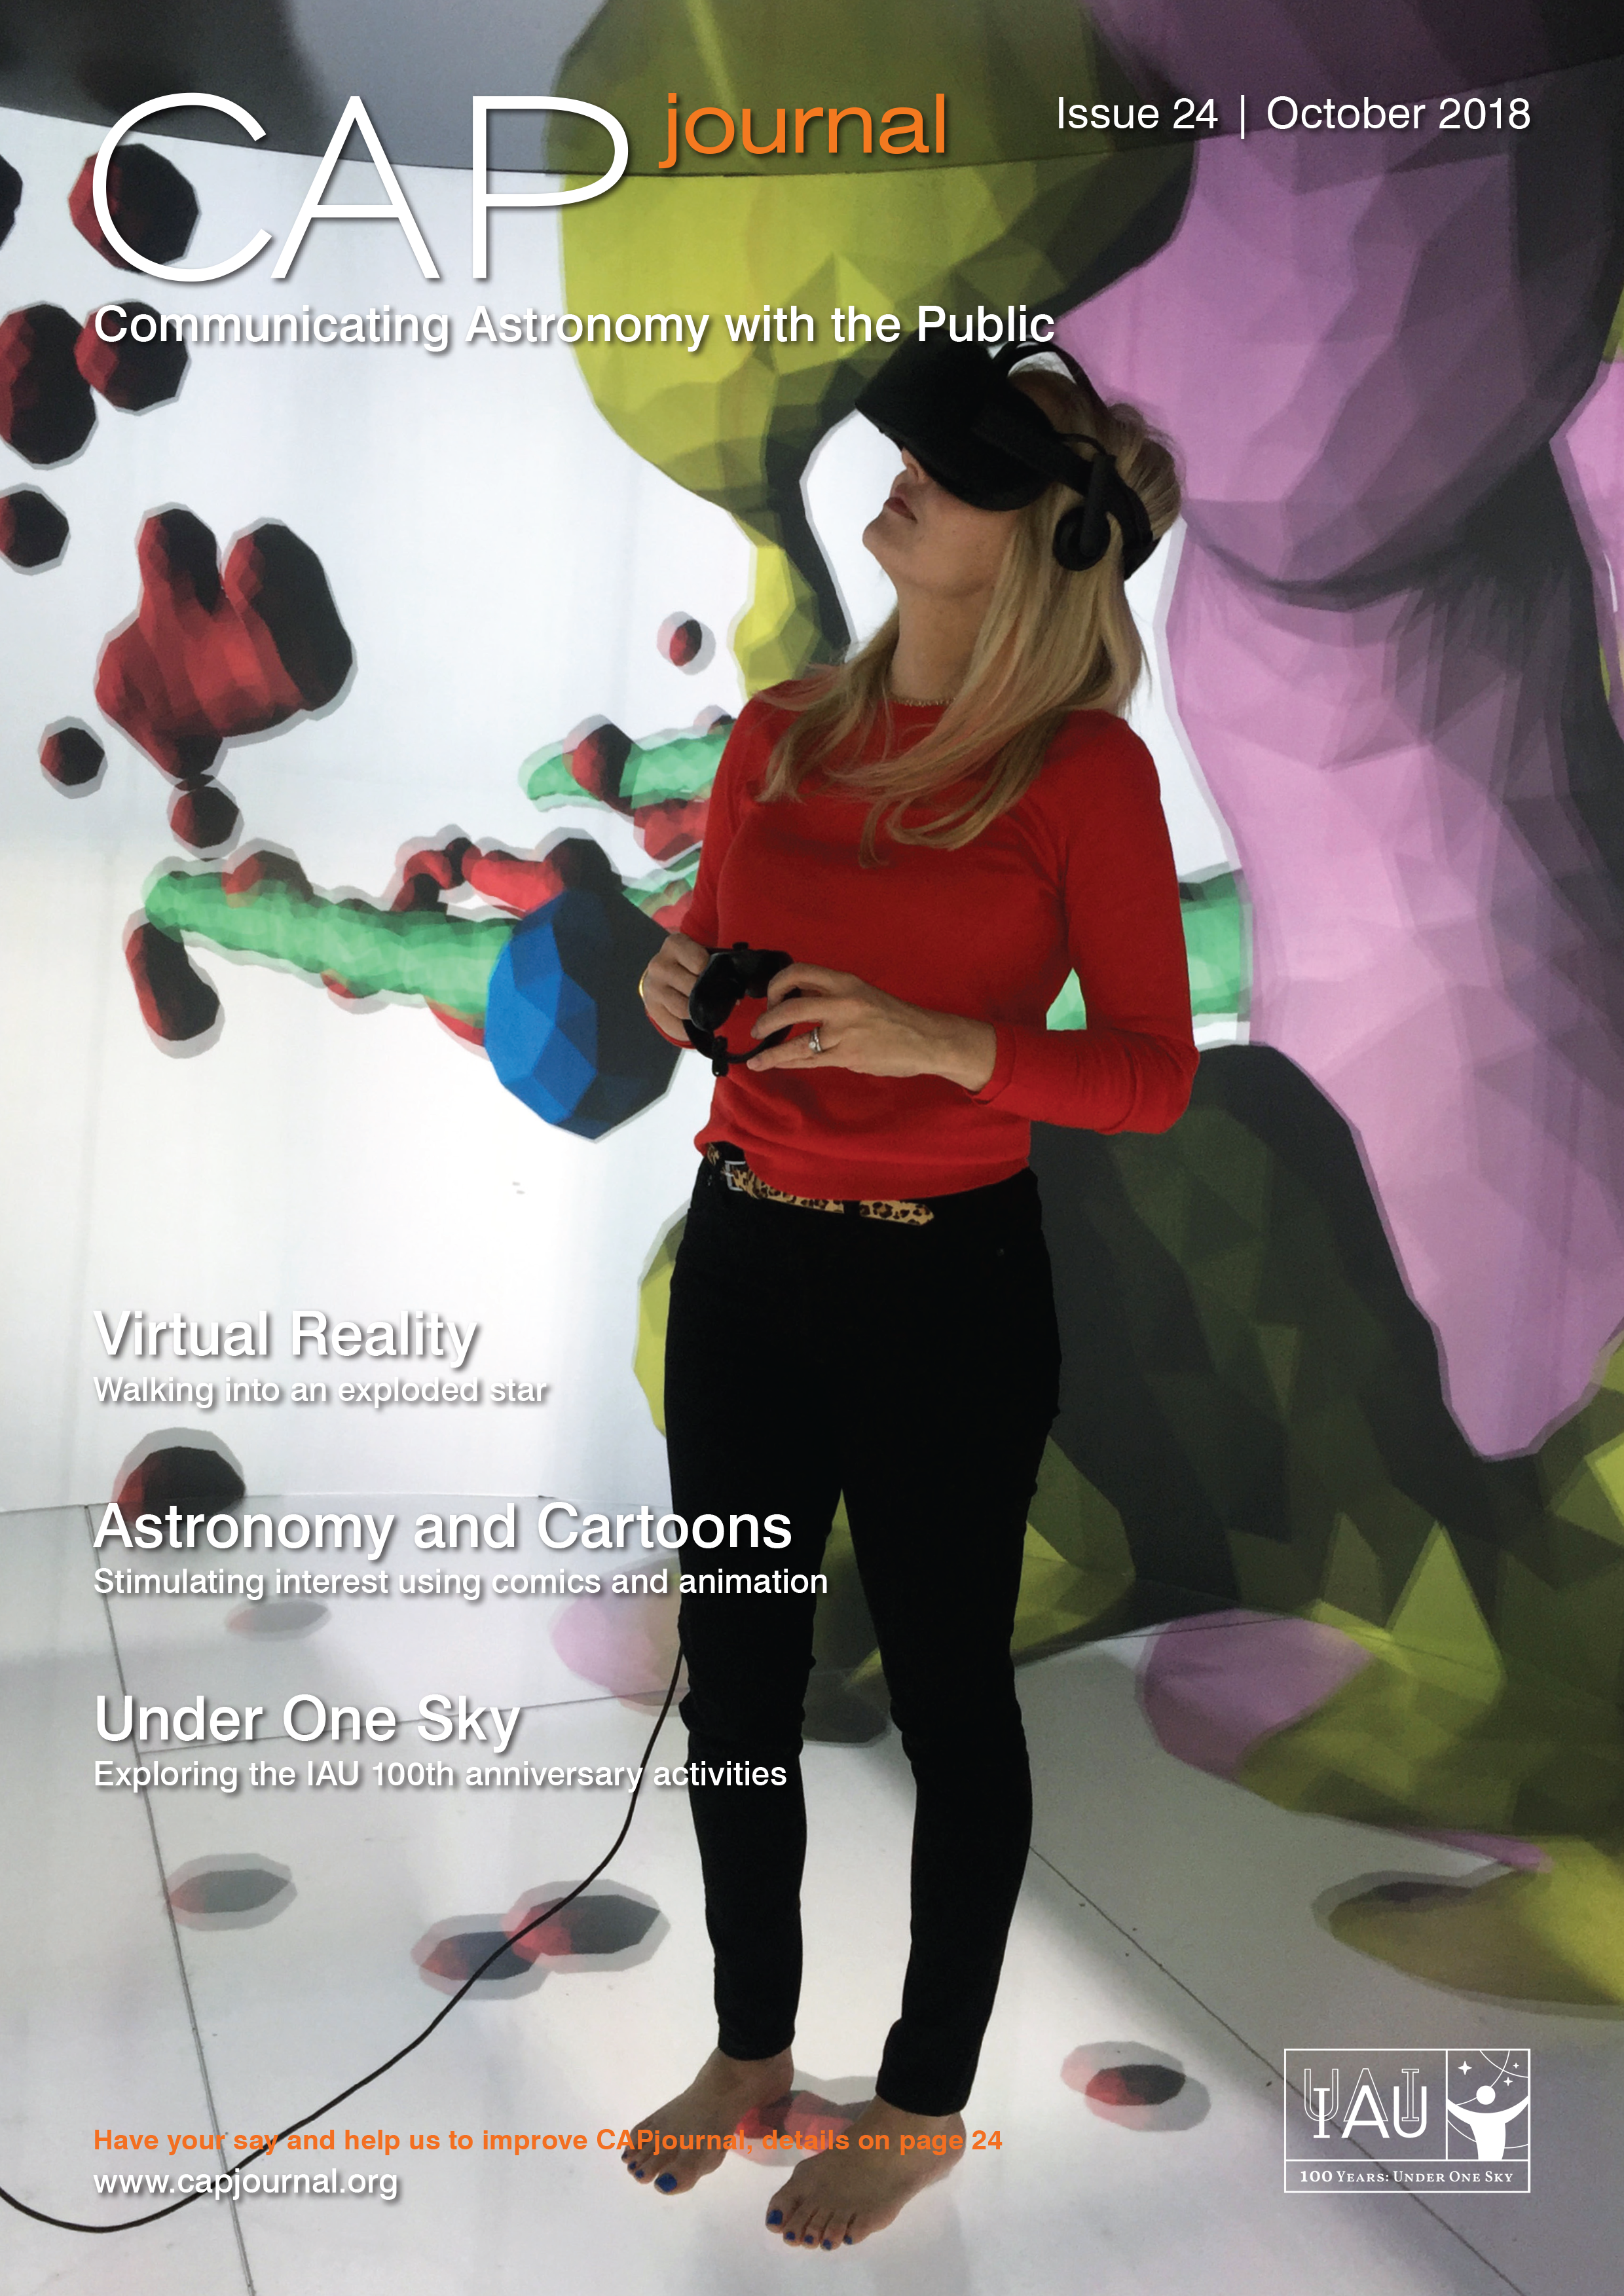

Cover of CAPjournal issue 24

The CAPjournal is a free peer-reviewed journal for astronomy communicators, online and in print. To subscribe to the print or online version please go here: http://www.capjournal.org/subscription.php. This issue in PDF format is available on: http://www.capjournal.org/issues/24/

Credit: CAPjournal